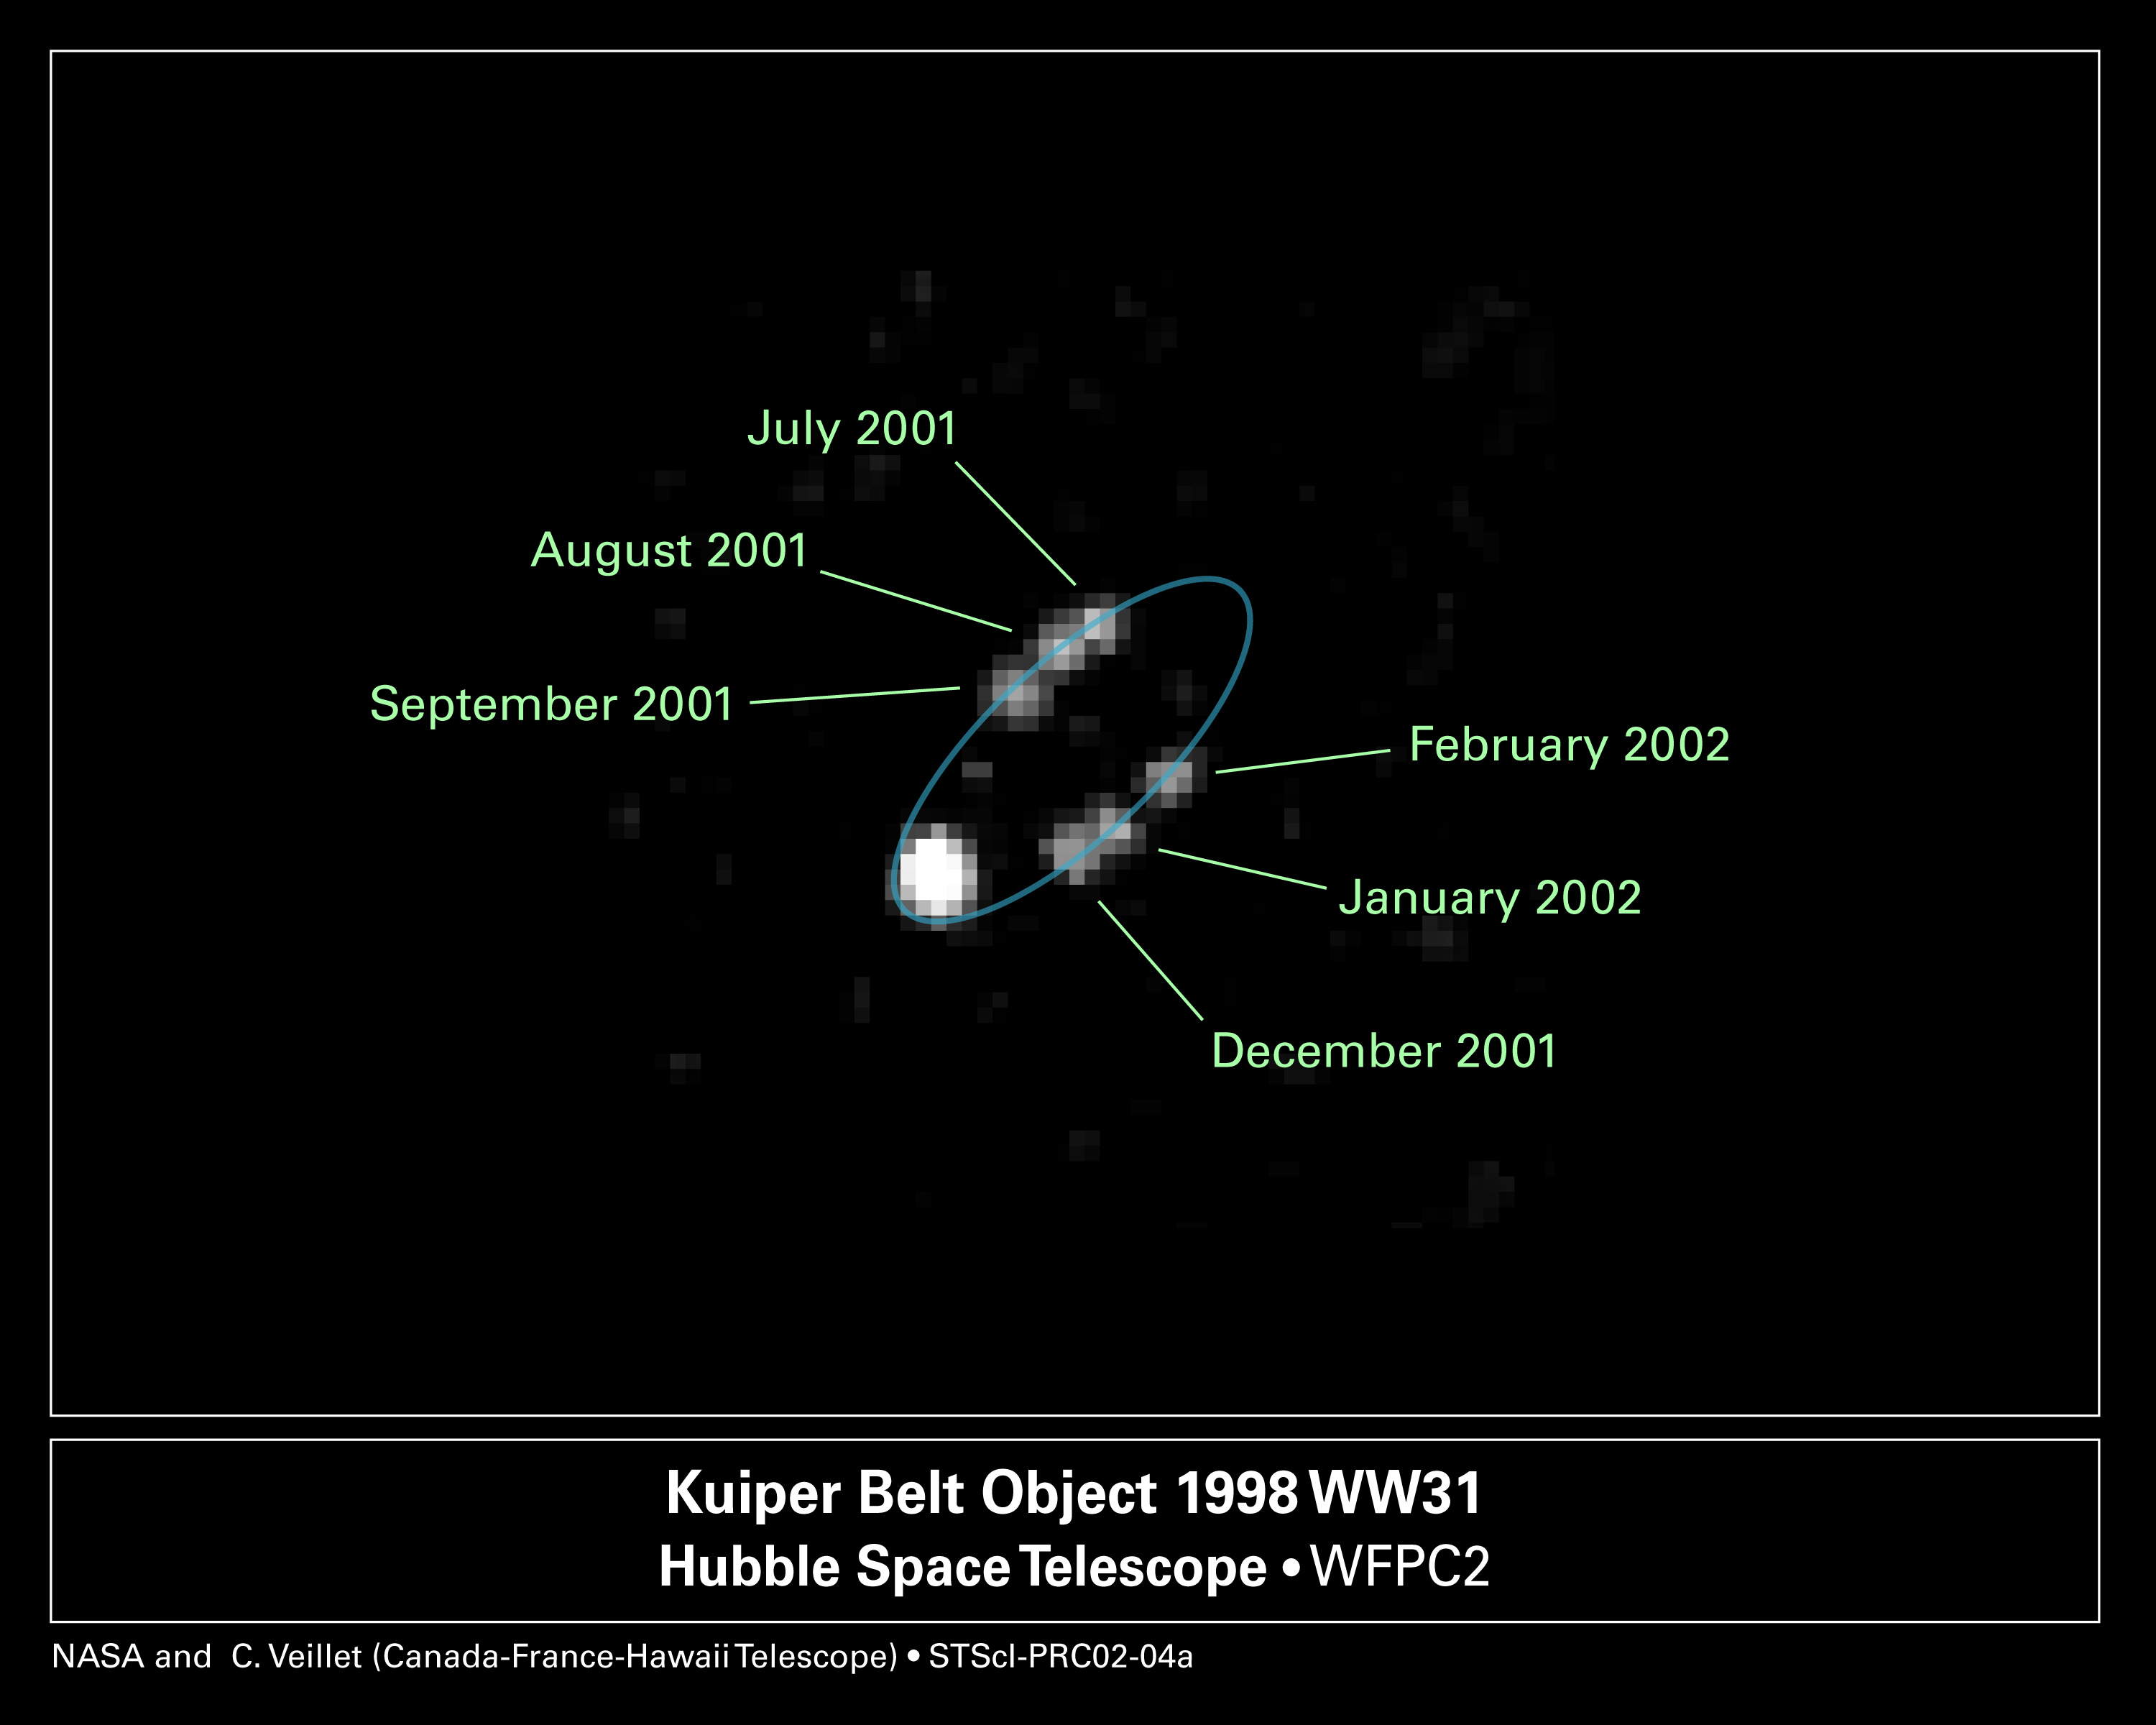

Hubble Hunts Down Binary Objects at the Fringe of Our Solar System

NASA/ESA Hubble Space Telescope snapped pictures of a double system of icy bodies in the Kuiper Belt. This composite picture shows the apparent orbit of one member of the pair. In reality, the objects, called 1998 WW31, revolve around a common center of gravity, like a pair of waltzing skaters. This picture shows the motion of one member of the duo [the six faint blobs] relative to the other [the large white blob]. The blue oval represents the orbital path. Astronomers assembled this picture from six separate exposures, taken from July to September 2001, December 2001, and January to February 2002.

Astronomers used the Hubble telescope to study the orbit of this binary system. They then used that information to determine other characteristics of the duo, such as their total mass, and their orbital period (the time it takes them to orbit each other).

Credit: NASA/ESA and C. Veillet (Canada-France-Hawaii Telescope)